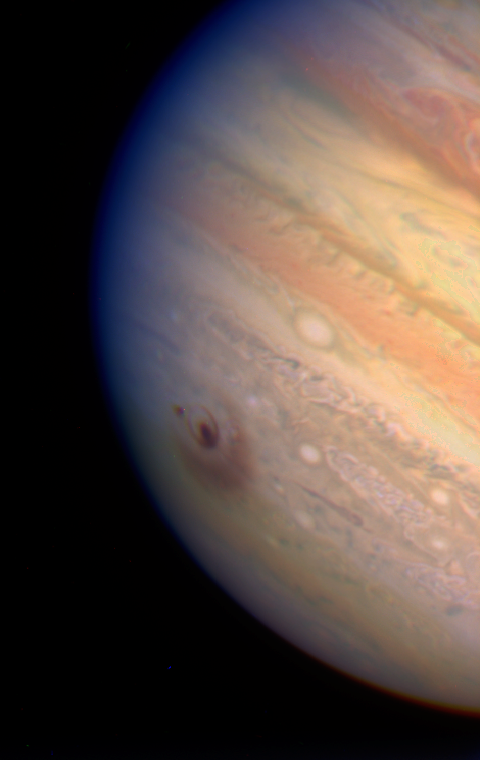

True colour image of impact zones D and G

This true colour image of the giant planet Jupiter, by NASA and ESA's Hubble Space Telescope, reveals the impact sites of fragments 'D' and 'G' from Comet Shoemaker-Levy 9.

Credit: H. Hammel, MIT and NASA/ESA